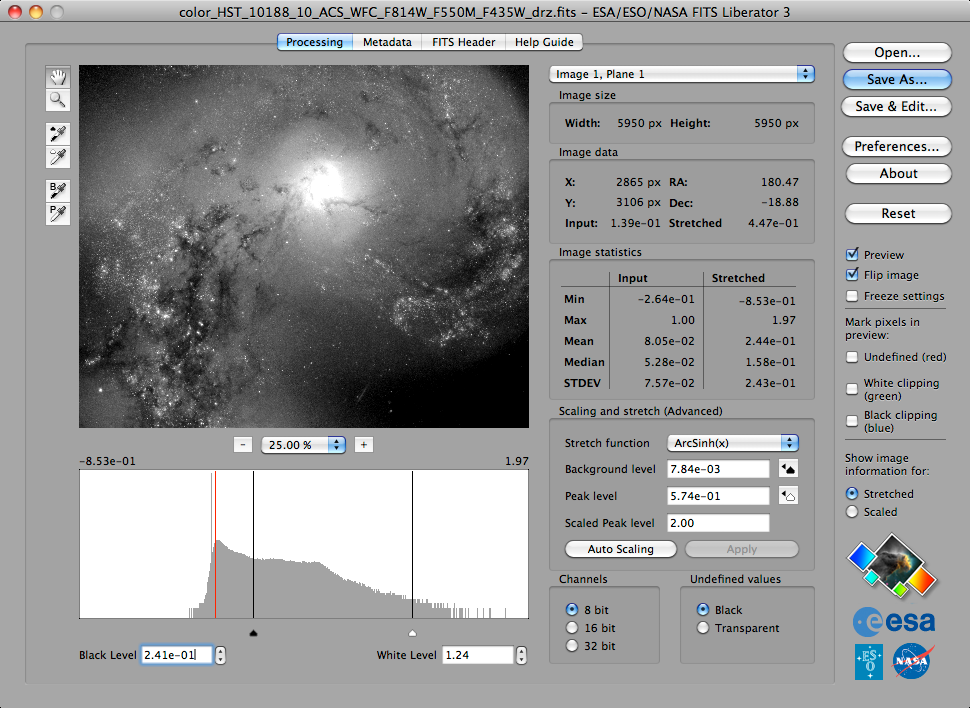

Screenshot of the ESA/ESO/NASA FITS Liberator version 3

This image shows the third — and best — version of the popular ESA/ESO/NASA FITS Liberator image processing software, which includes several significant improvements over previous versions.

Credit: ESA/ESO/NASA